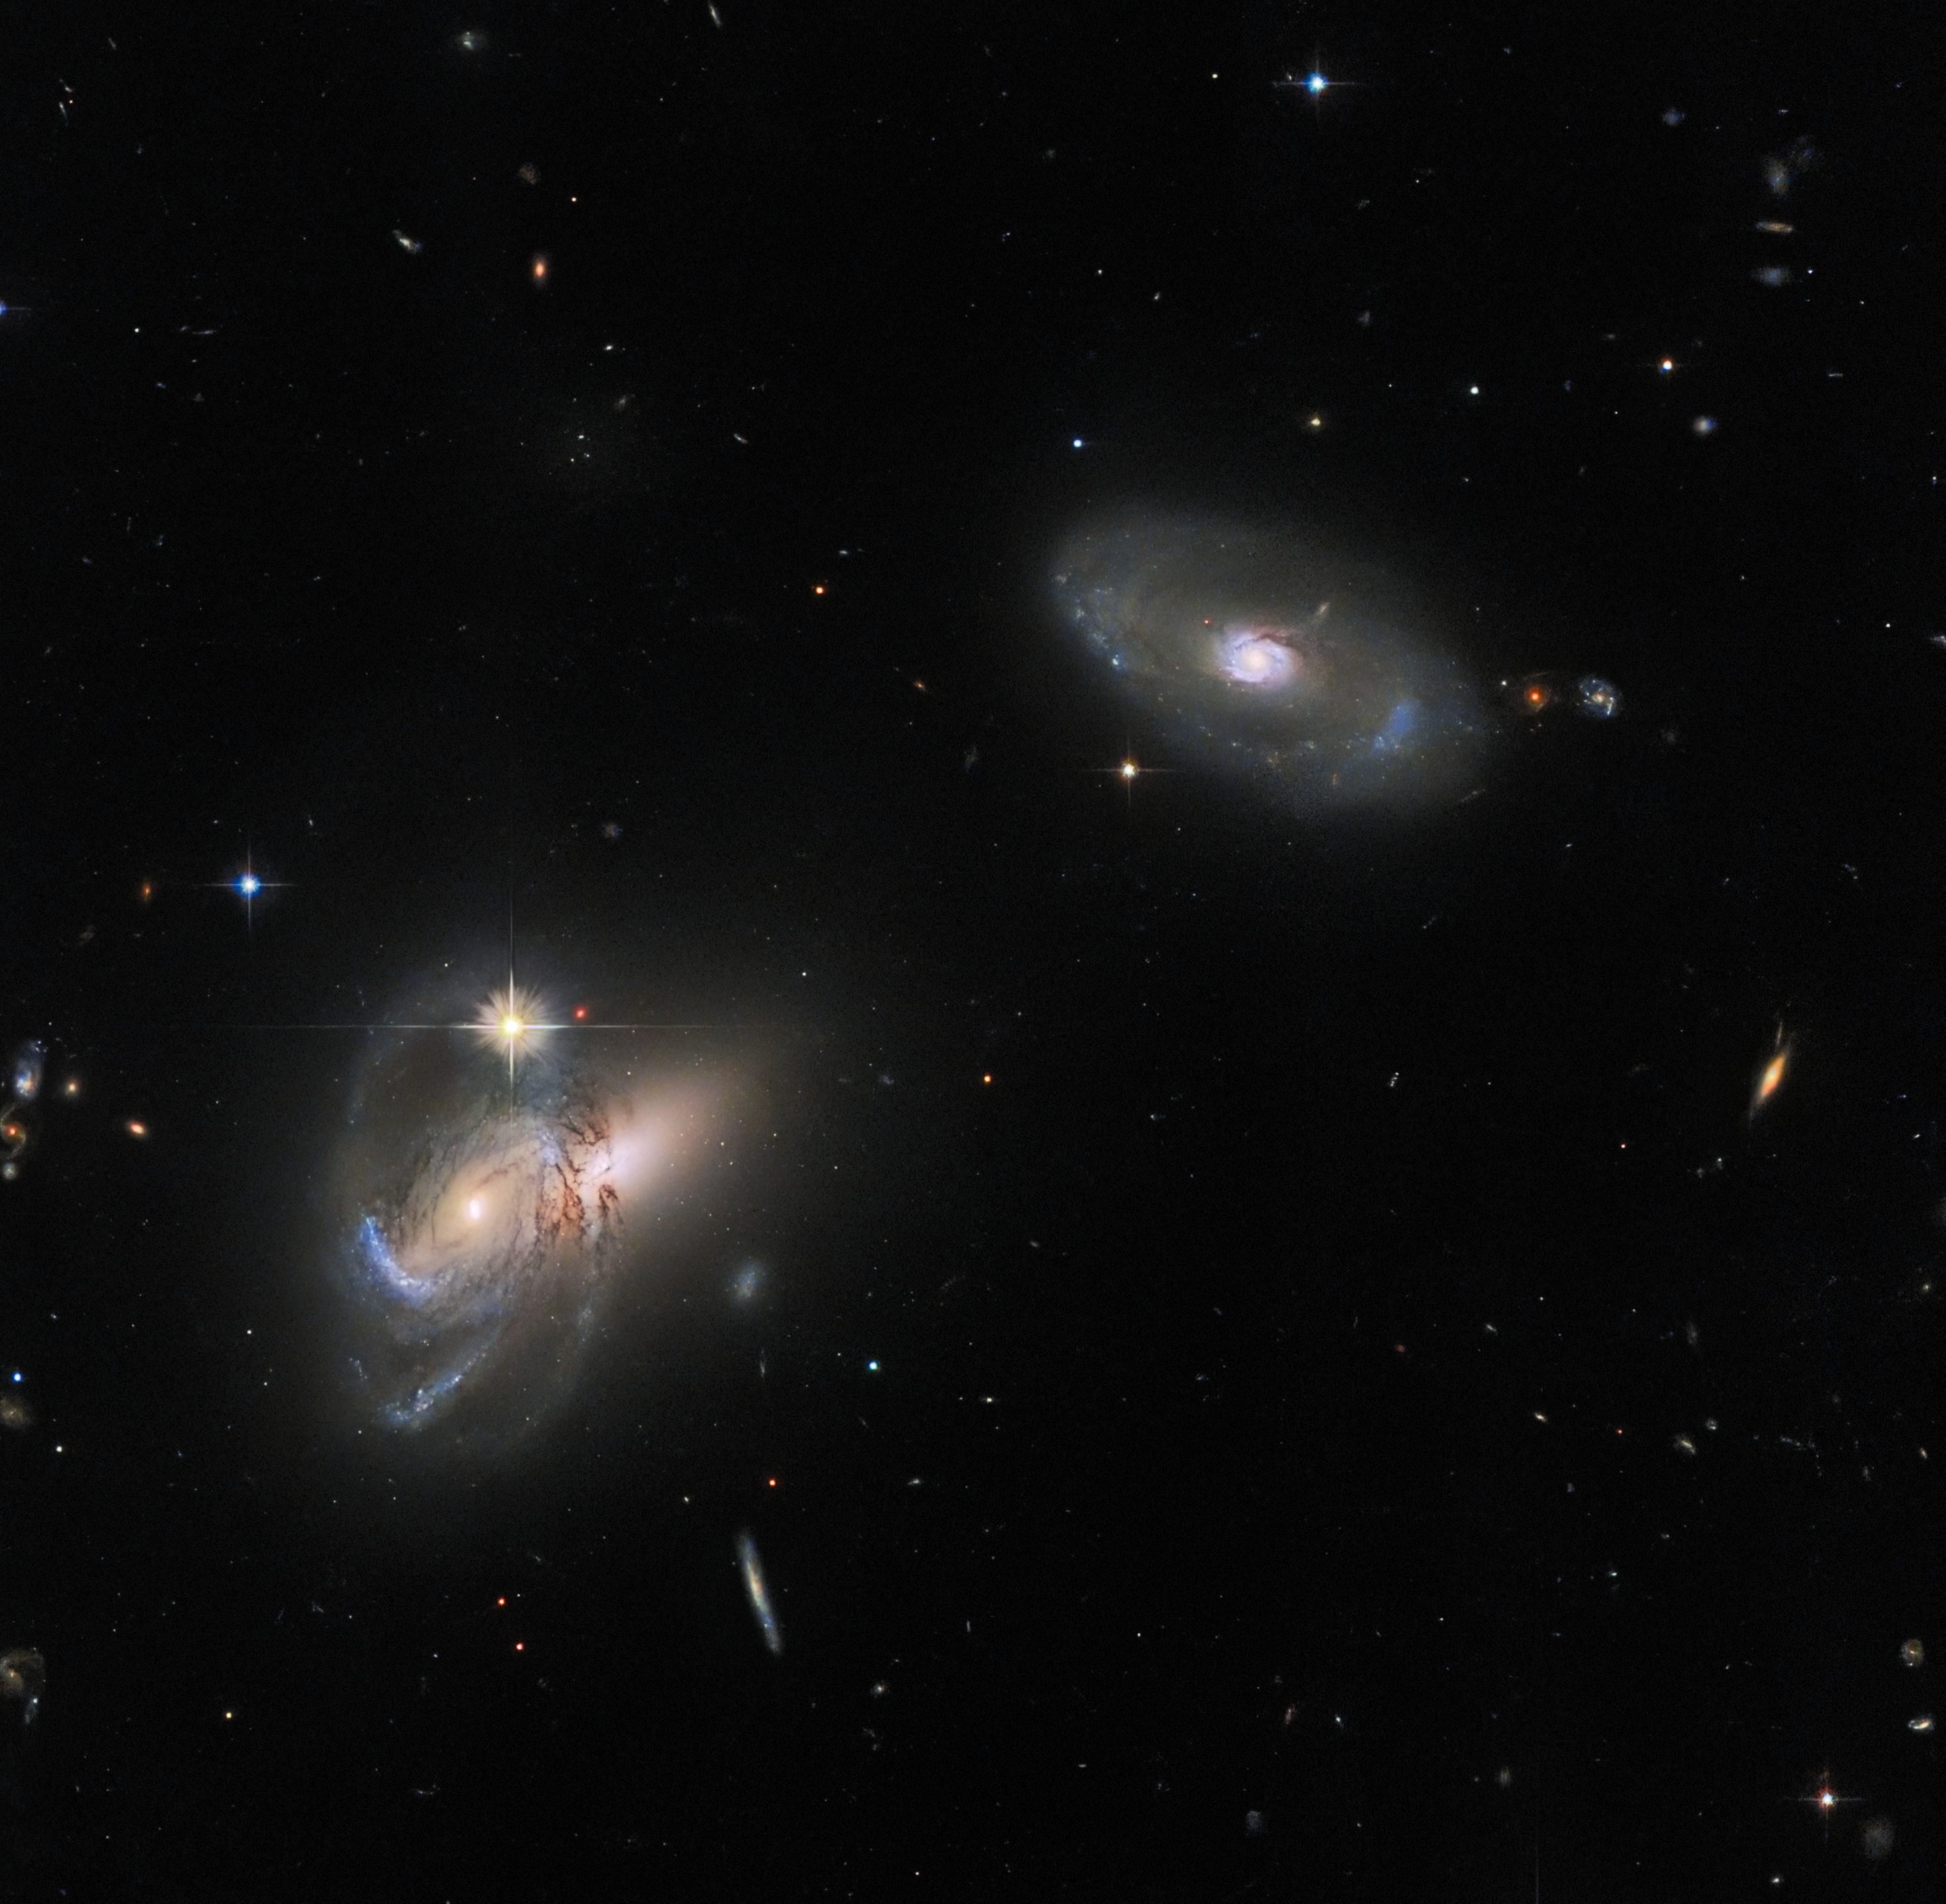

Follow the LEDA

This luminescent image features multiple galaxies, perhaps most noticeably LEDA 58109, the lone galaxy in the upper right. LEDA 58109 is flanked by two further galactic objects to its lower left — an active galactic nucleus (AGN) called SDSS J162558.14+435746.4 that partially obscures the galaxy SDSS J162557.25+435743.5, which appears to poke out to the right behind the AGN.

Galaxy classification is sometimes presented as something of a dichotomy: spiral and elliptical. However, the diversity of galaxies in this image alone highlights the complex web of galaxy classifications that exist, including galaxies that house extremely luminous AGNs at their cores, and galaxies whose shapes defy the classification of either spiral or elliptical.

The sample of galaxies here also illustrates the wide variety of names that galaxies have: some relatively short, like LEDA 58109, and some very long and challenging to remember, such as the two galaxies to the left. This is due to the variety of cataloguing systems that chart the celestial objects in the night sky. No one catalogue is exhaustive, and they cover overlapping regions of the sky, so that many galaxies belong to several different catalogues. For example, the galaxy on the right is LEDA 58109 in the LEDA galaxy database, but is also known as MCG+07-34-030 in the MCG galaxy catalogue, and SDSS J162551.50+435747.5 in the SDSS galaxy catalogue — the same catalogue that also lists the two galaxies to the left.

Credit: ESA/Hubble & NASA, W. Keel